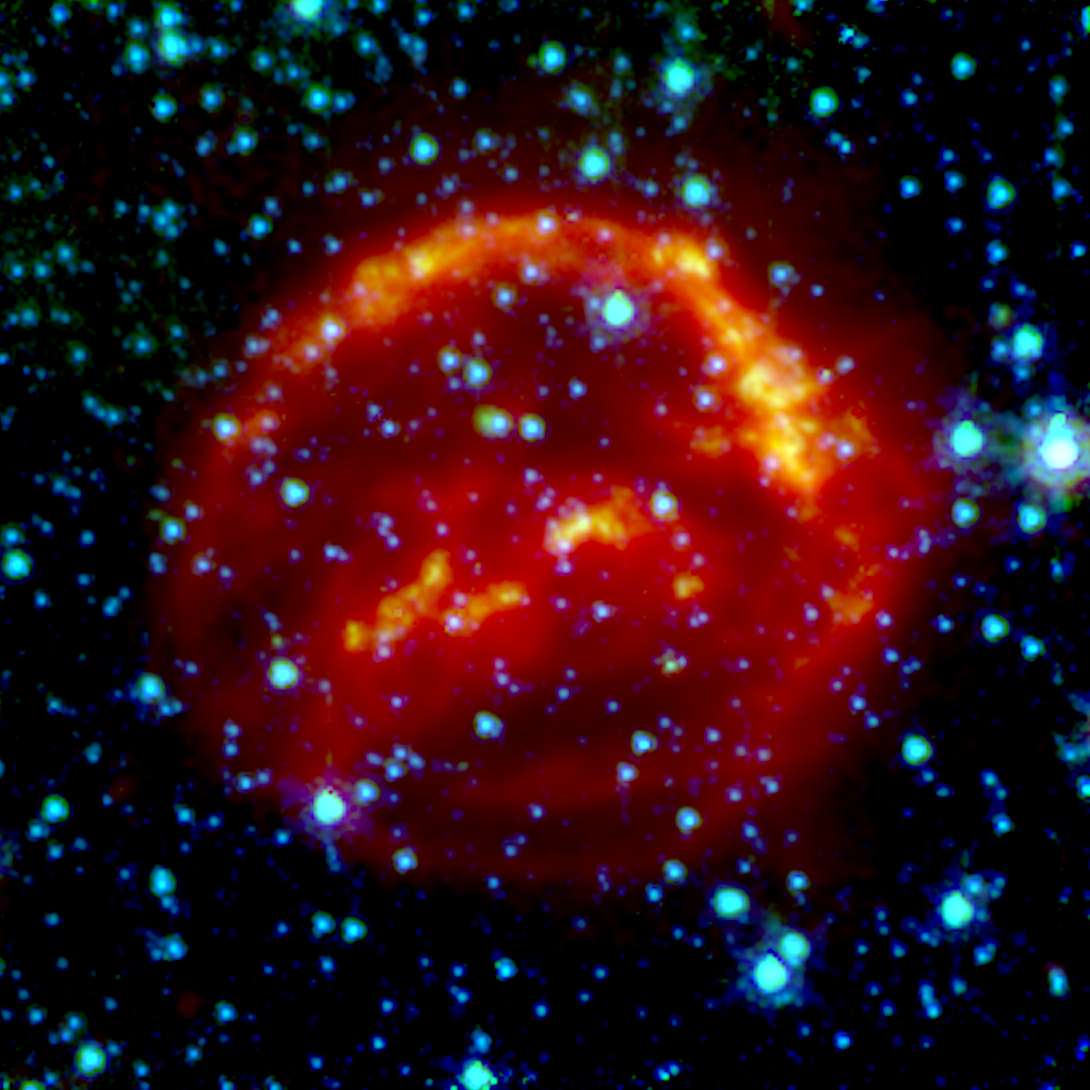

Spitzer Space Telescope: Kepler's Supernova Remnant (infrared data)

This image shows the remains of Kepler's Supernova, the most recent exploding star to be seen in the Milky Way Galaxy. It was first observed 400 years ago when it was thought to be 'a new star'. In fact, it was the the gas and dust from an exploding star, rapidly expanding. These remnants have now reached a diameter of 14 light years wide and are still expanding at 4 million miles per hour.

This image, taken by the Spitzer Space Telescope in the Infrared, shows microscopic dust particles — coloured red — that have been heated by the supernova shock wave.

Credit: NASA, ESA, R. Sankrit and W. Blair (Johns Hopkins University)